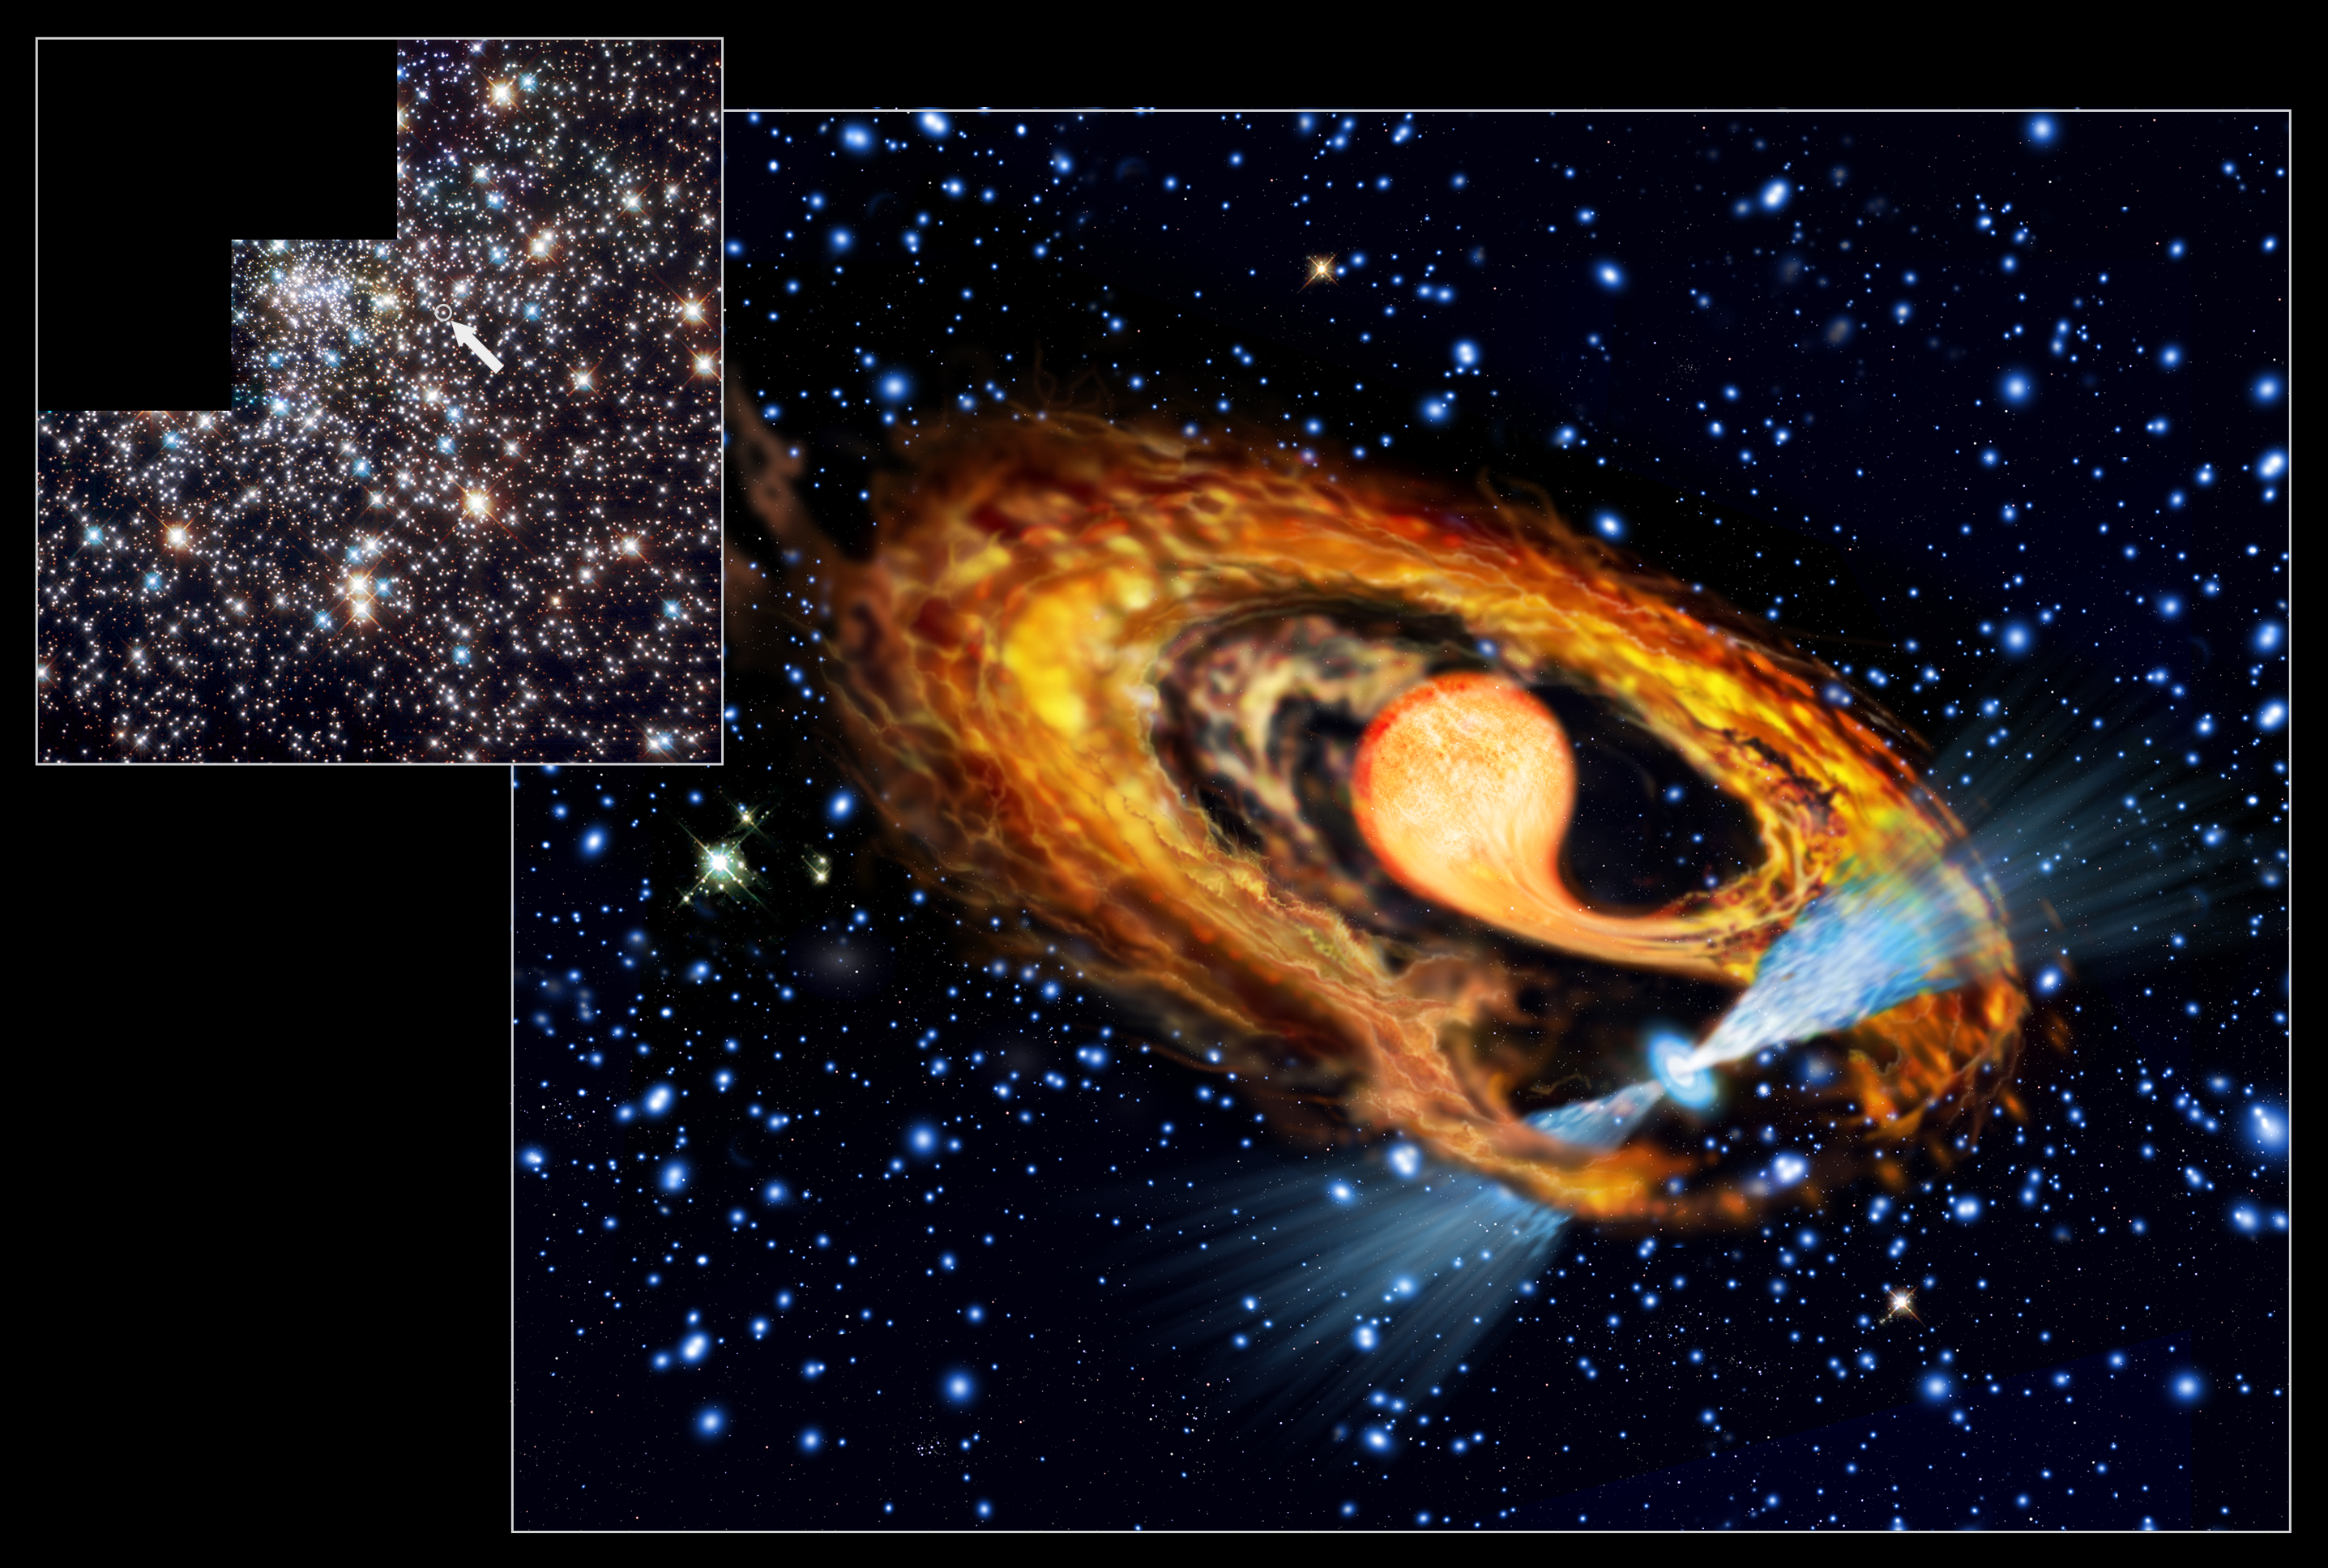

First view of a newborn millisecond pulsar?

This composite shows an artist's impression (center) of a millisecond pulsar and its companion with an insert of the ESA/NASA/ESA Hubble Space Telescope image of the region (upper left). The millisecond pulsar system lies in the globular cluster NGC 6397 in Ara (the Altar). In the Hubble image insert the companion star is marked with an arrow. The artist's impression shows the pulsar (seen in blue with two radiation beams) and its bloated red companion star. Scientists believe that the best explanation for seeing a bloated red star instead of a 'quiet' white dwarf in the system is that the pulsar only recently has been spun up to its current rotation speed of 274 times per second by the gases transferred by the red star. It is the first time such a system has been observed.

Credit: European Space Agency & Francesco Ferraro (Bologna Astronomical Observatory)